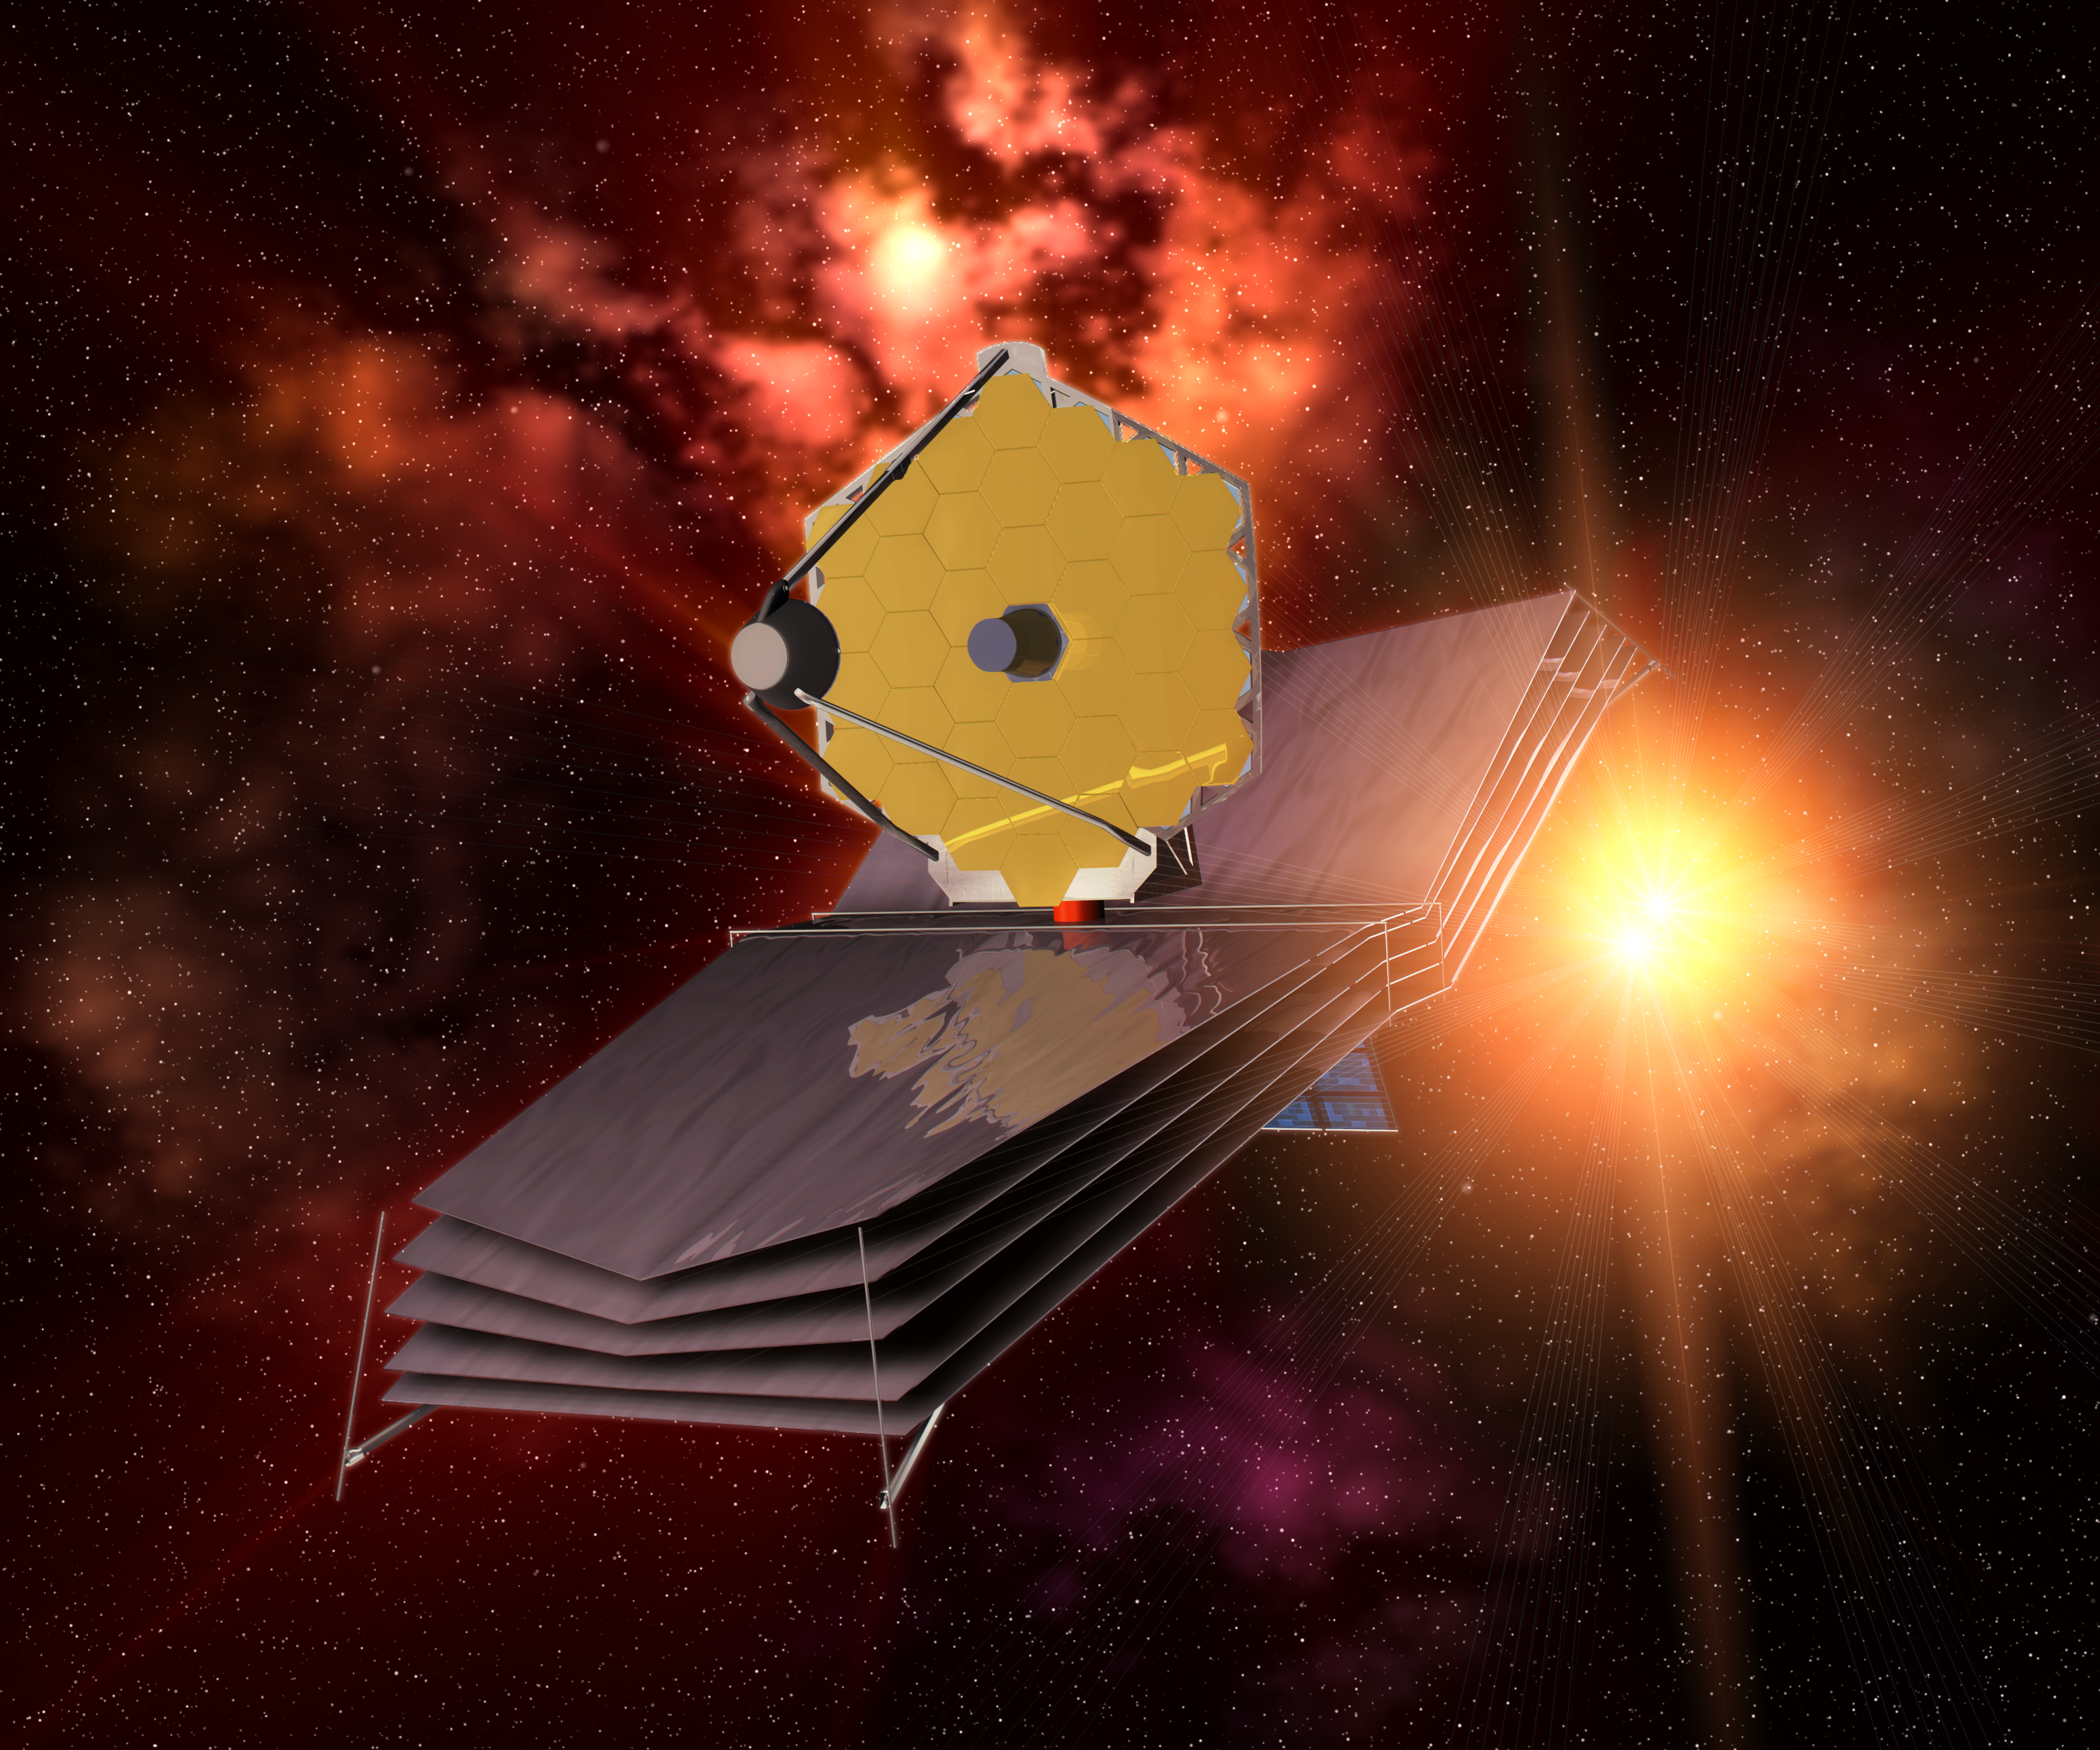

The James Webb Space Telescope (artist's impression)

The James Webb Space Telescope turns its sun shield towards our home star, protecting the optics from the glaring sunlight.

Credit: ESA